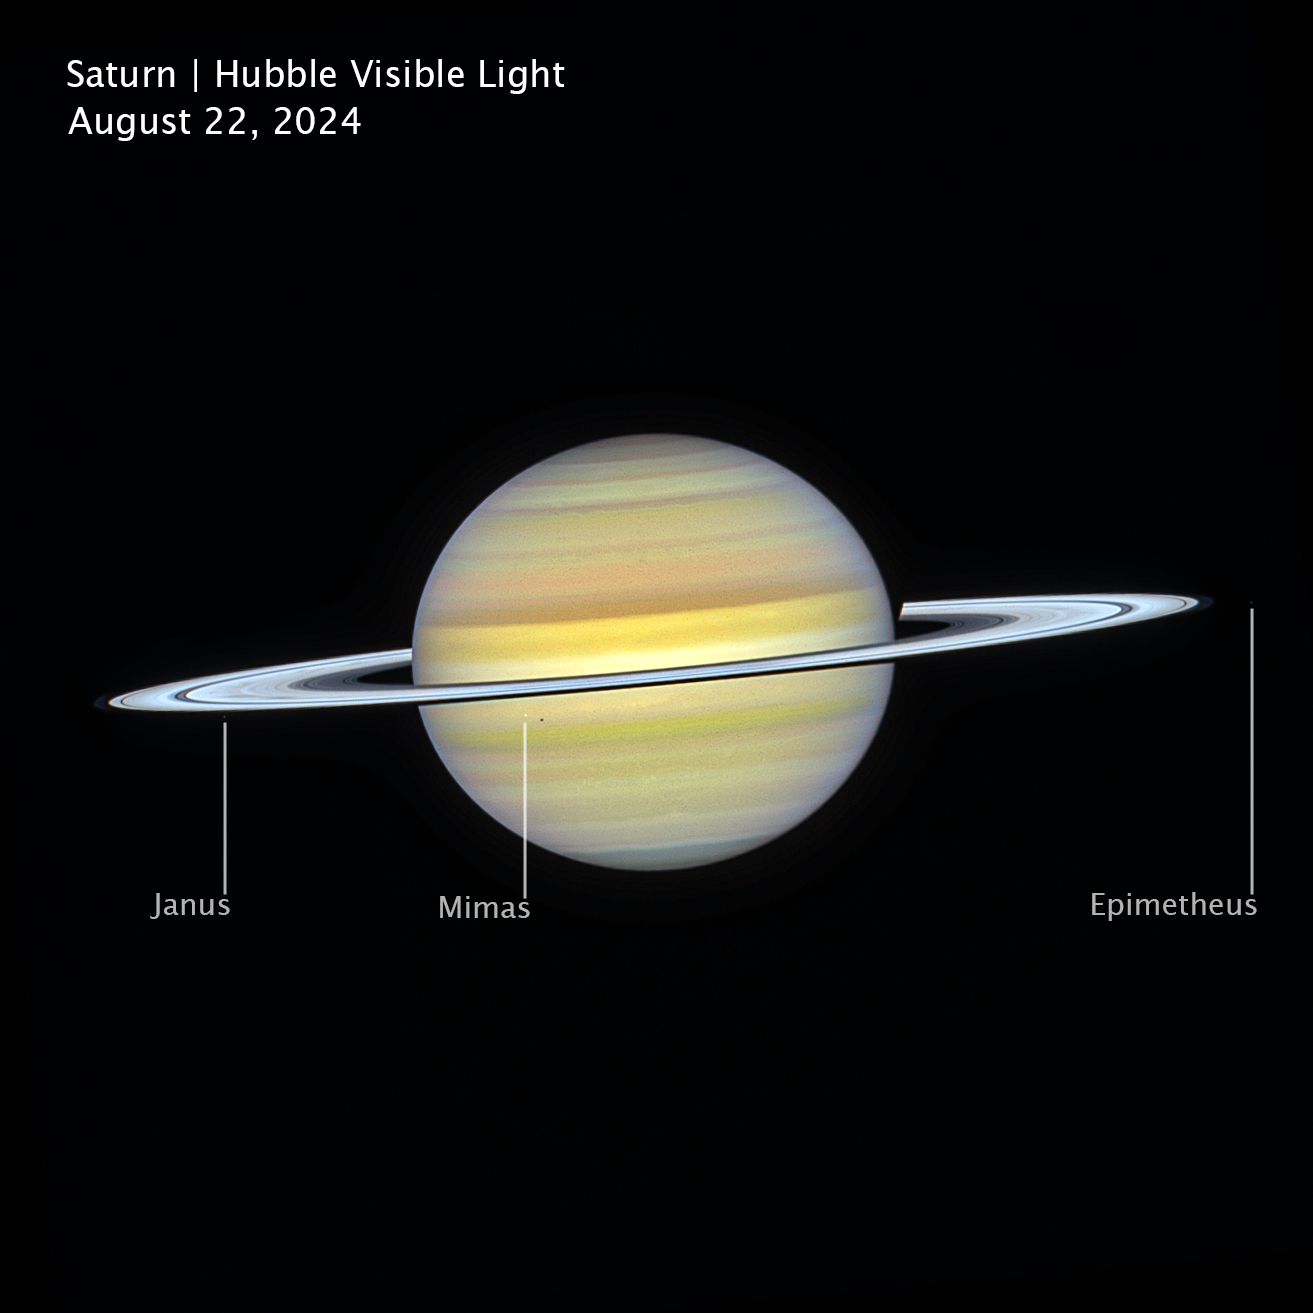

Saturn (Hubble image, cropped and annotated)

This visible-light image of Saturn, captured on 22 August 2024, by the NASA/ESA Hubble Space Telescope as part of its long-running Outer Planet Atmospheres Legacy (OPAL) program, reveals the planet’s softly banded atmosphere and bright ring system.

Several of Saturn’s larger moons appear in the image. Janus is visible to the left of the planet along the rings, while Mimas appears closer to the disk as a small point of light, with its shadow superimposed on Saturn. On the right side of the image is Epimetheus, a moon that shares a unique co-orbital relationship with Janus.

The image helps scientists track seasonal changes, storms, and evolving atmospheric features on the ringed giant over time.

Credit: NASA, ESA, A. Simon (NASA-GSFC), M. Wong (University of California); Image Processing: J. DePasquale (STScI)